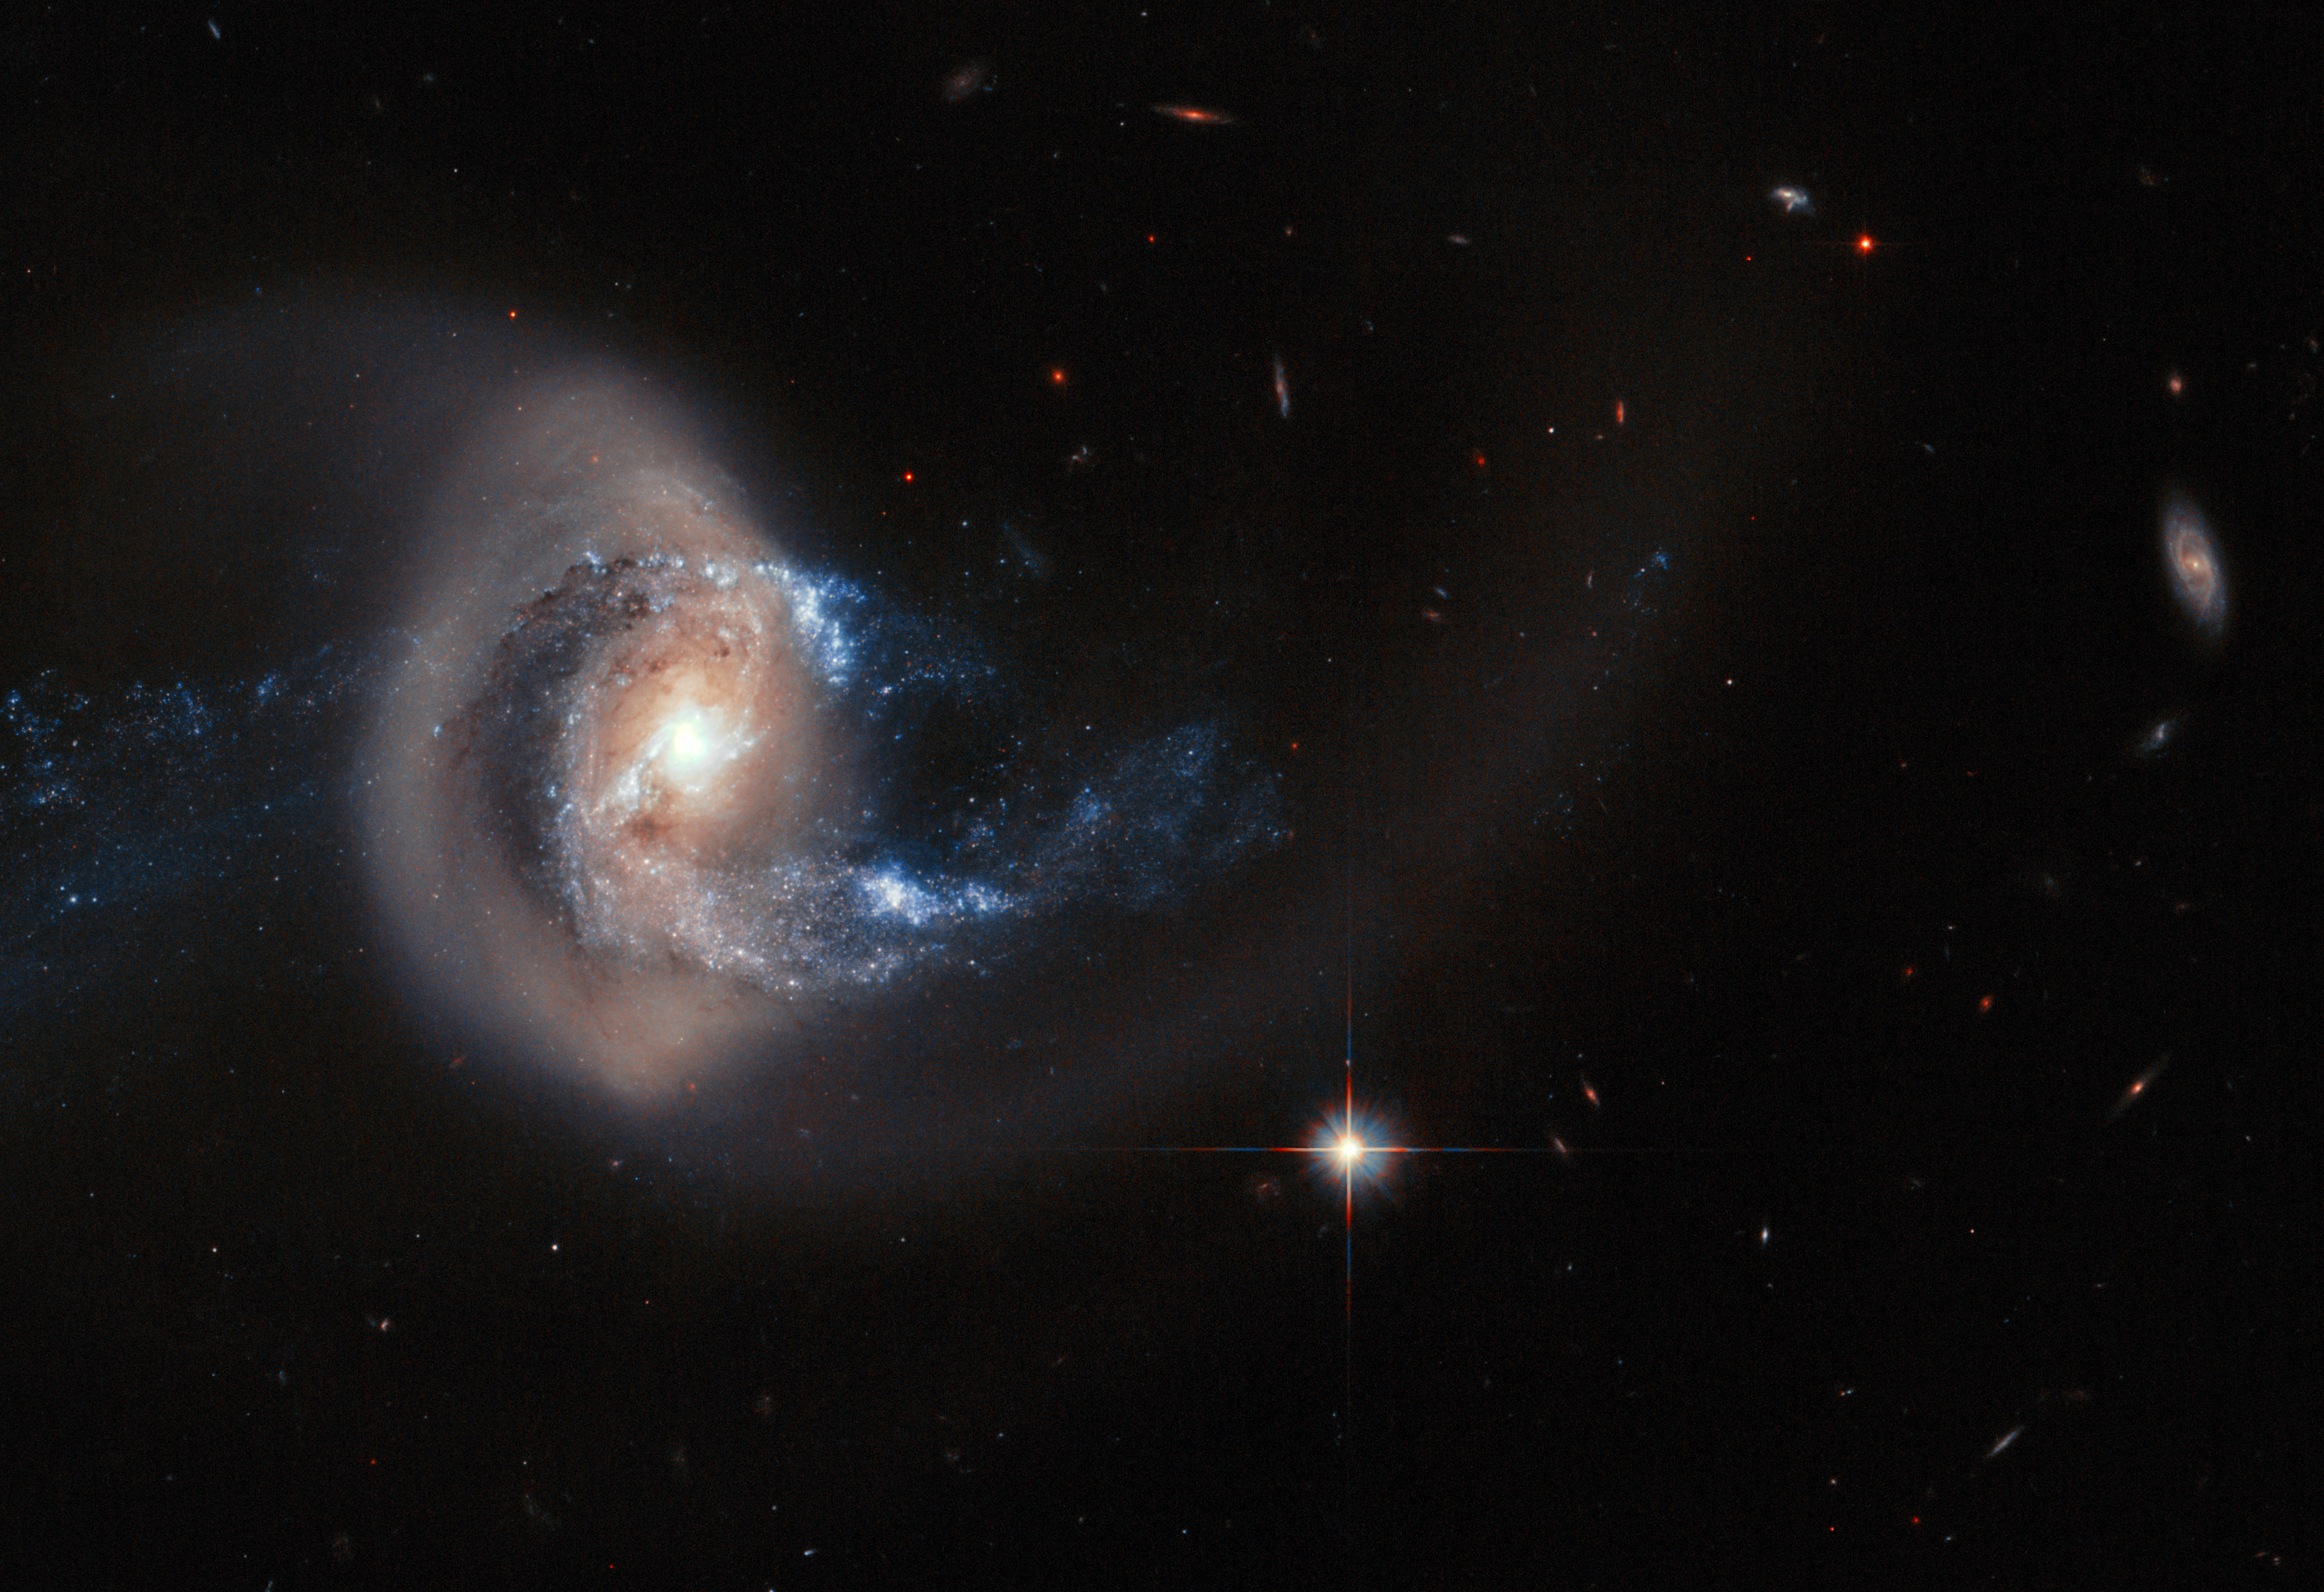

Hubble image of NGC 7714

NGC 7714 is a spiral galaxy 100 million light-years from Earth — a relatively close neighbour in cosmic terms.

The galaxy has witnessed some violent and dramatic events in its recent past. Tell-tale signs of this brutality can be seen in NGC 7714's strangely shaped arms, and in the smoky golden haze that stretches out from the galactic centre — caused by an ongoing merger with its smaller galactic companion NGC 7715, which is out of the frame of this image.

Credit: ESA, NASA
Acknowledgement: A. Gal-Yam (Weizmann Institute of Science)